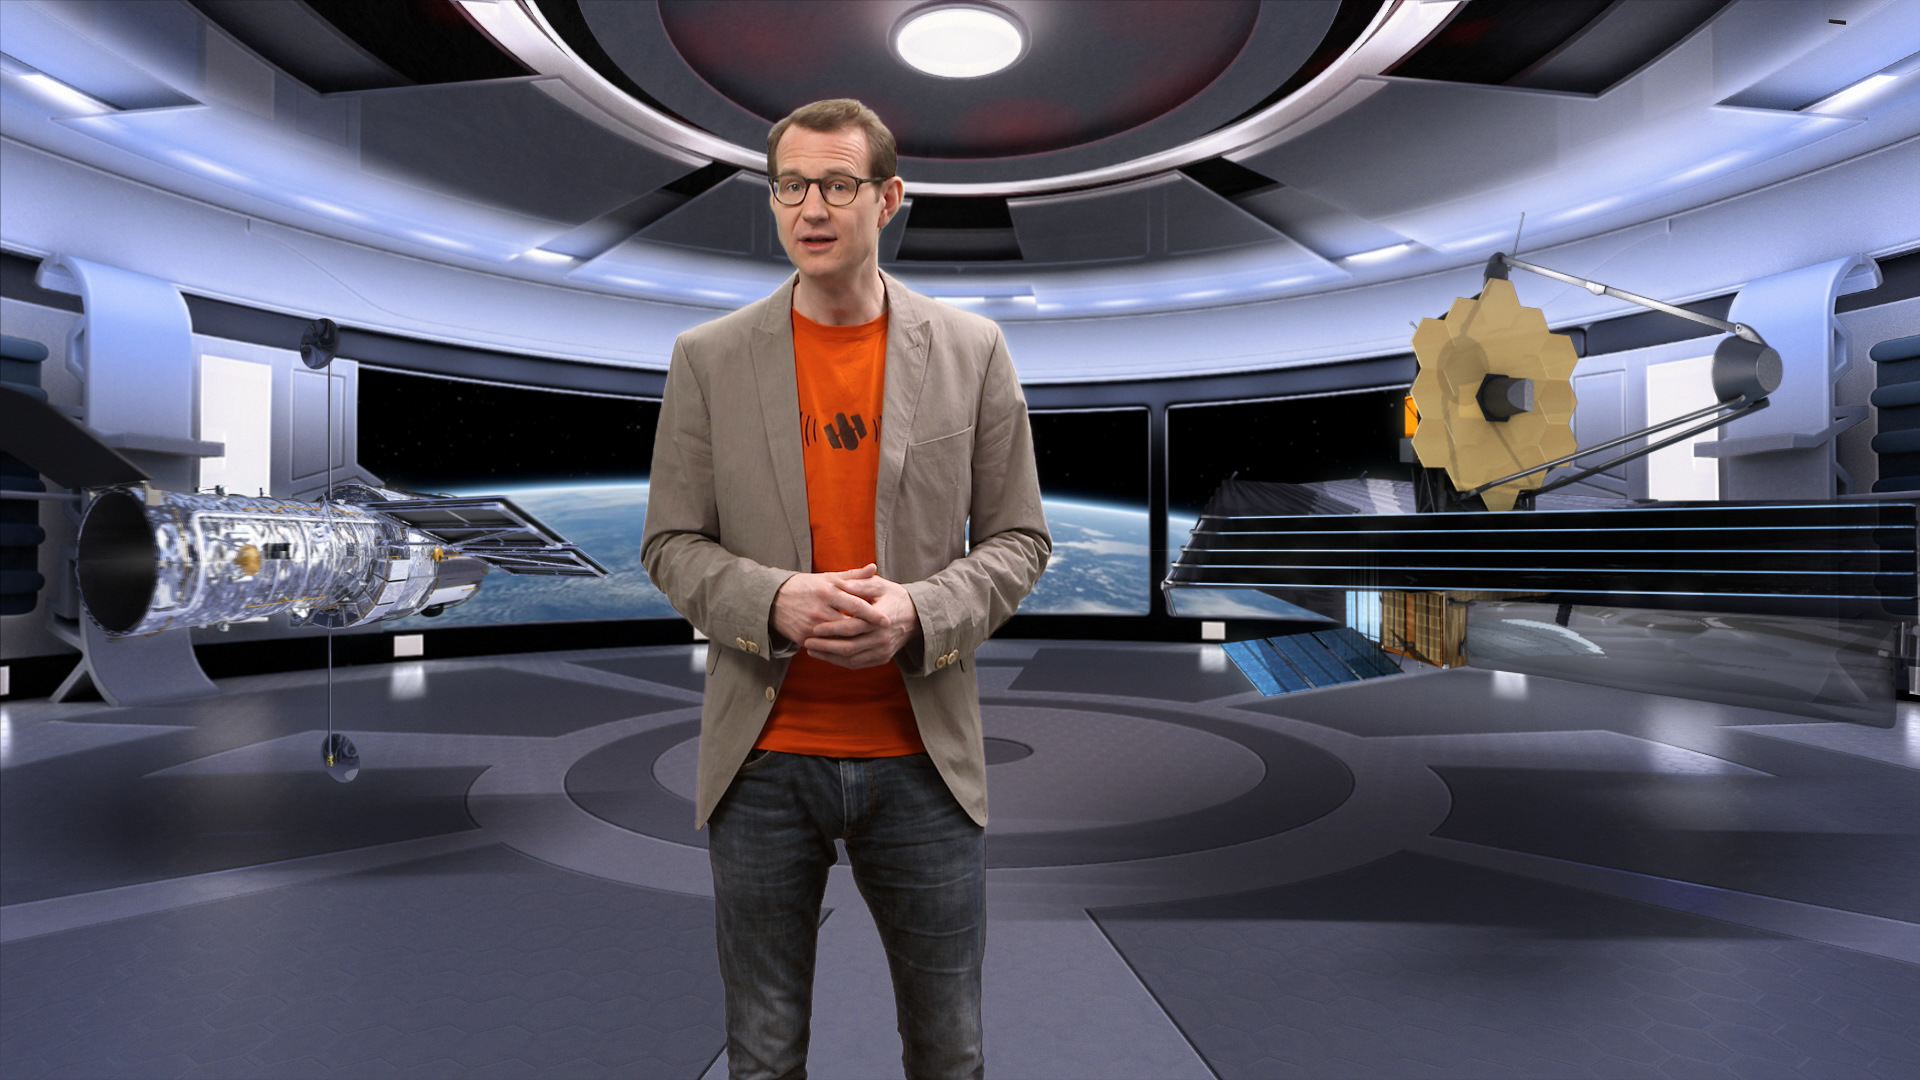

Still from Hubblecast 83: a cosmic double act — Hubble meets James Webb

This is a still from Hubblecast 83 which celebrates the relationship that the Hubble Space Telescope will have with its future colleague, the James Webb Space Telescope.

Credit: NASA, ESA